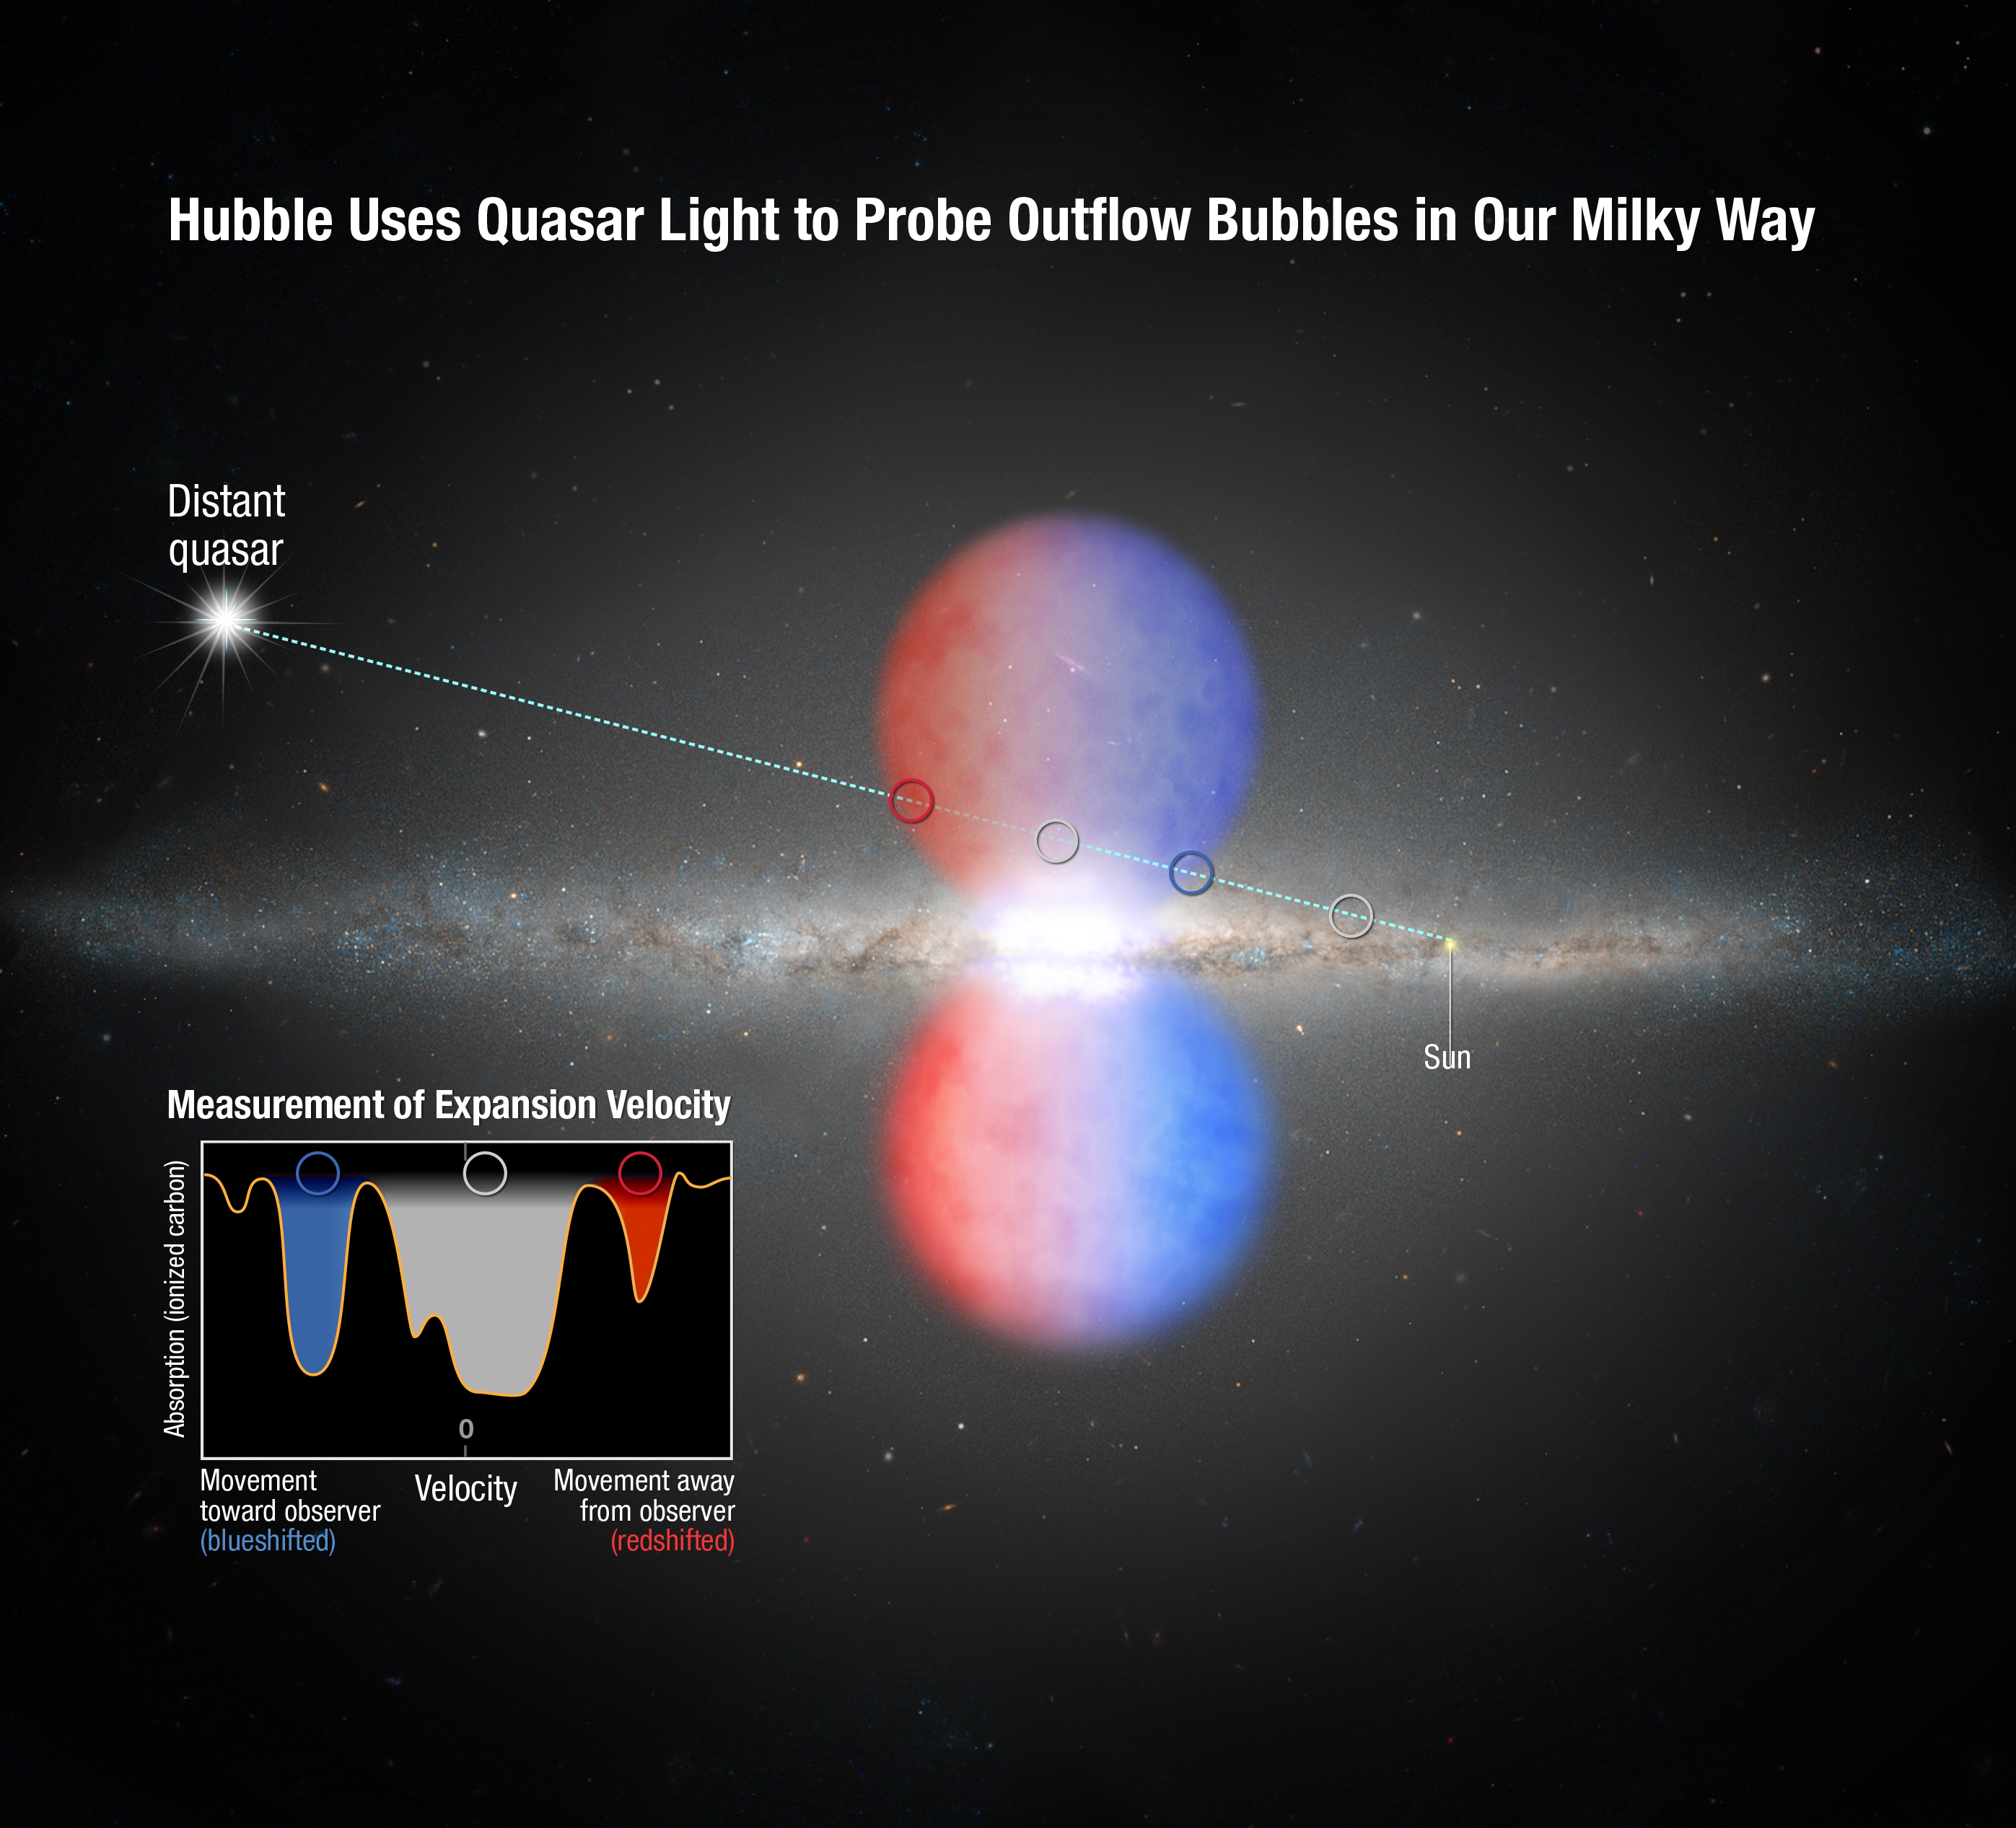

Probing the Milky Way's outflow

This graphic shows how the NASA/ESA Hubble Space Telescope probed the light from a distant quasar to analyse the so-called Fermi Bubbles — two lobes of material being blown out of the core of the Milky Way.

The quasar's light passed through one of the bubbles. Imprinted on that light is information about the outflow's speed, composition, and mass. Astronomers used this information to find out that the winds are rushing out of the Milky Way at more than three million kilometres per hour.

The outflow was produced by a violent event that happened about two million years ago in our galaxy's core.

Credit: NASA, ESA, and A. Feild (STScI)